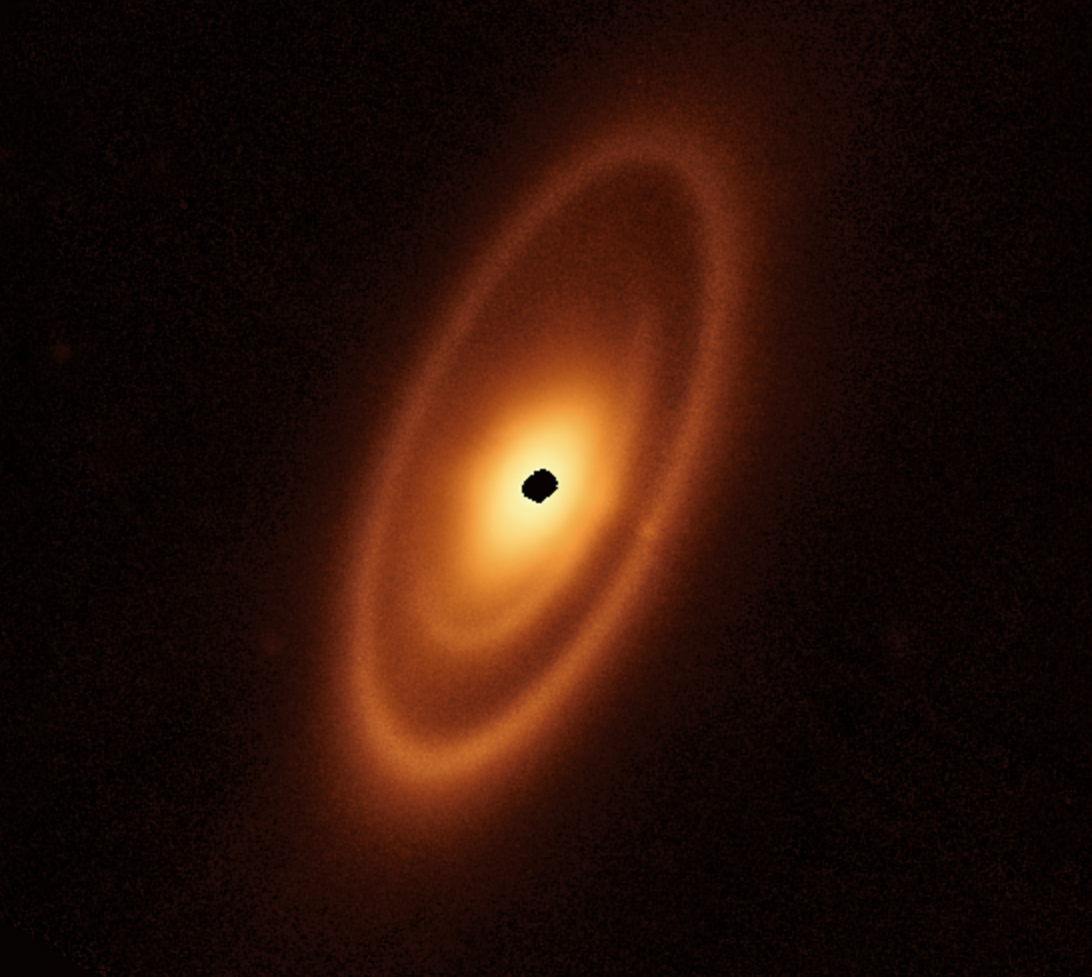

Webb inspects dusty debris disc around Fomalhaut

This image of the dusty debris disc surrounding the young star Fomalhaut is from Webb’s Mid-Infrared Instrument (MIRI). It reveals three nested belts extending out to 23 billion kilometres from the star. The inner belts — which had never been seen before — were revealed by Webb for the first time.

The NASA/ESA Hubble Space Telescope and ESA's Herschel Space Observatory, as well as the Atacama Large Millimeter/submillimeter Array (ALMA), have previously taken sharp images of the outermost belt. However, none of them found any structure interior to it.

These belts are most likely shaped by the gravitational forces produced by unseen planets.

Credit: NASA, ESA, CSA, A. Pagan (STScI), A. Gáspár (University of Arizona)